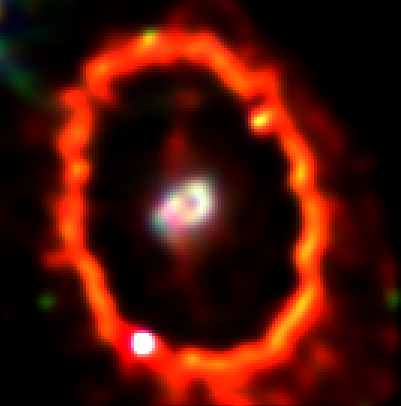

Supernova 1987a Ring

This NASA/ESA Hubble Space Telescope Wide Field and Planetary Camera 2image shows the glowing gas ring around supernova 1987A, as it appeared in 1994. The gas, excited by light from the explosion, has been fading for a decade.

Credit: Peter Garnavich (Harvard-Smithsonian Center for Astrophysics), andNASA/ESA